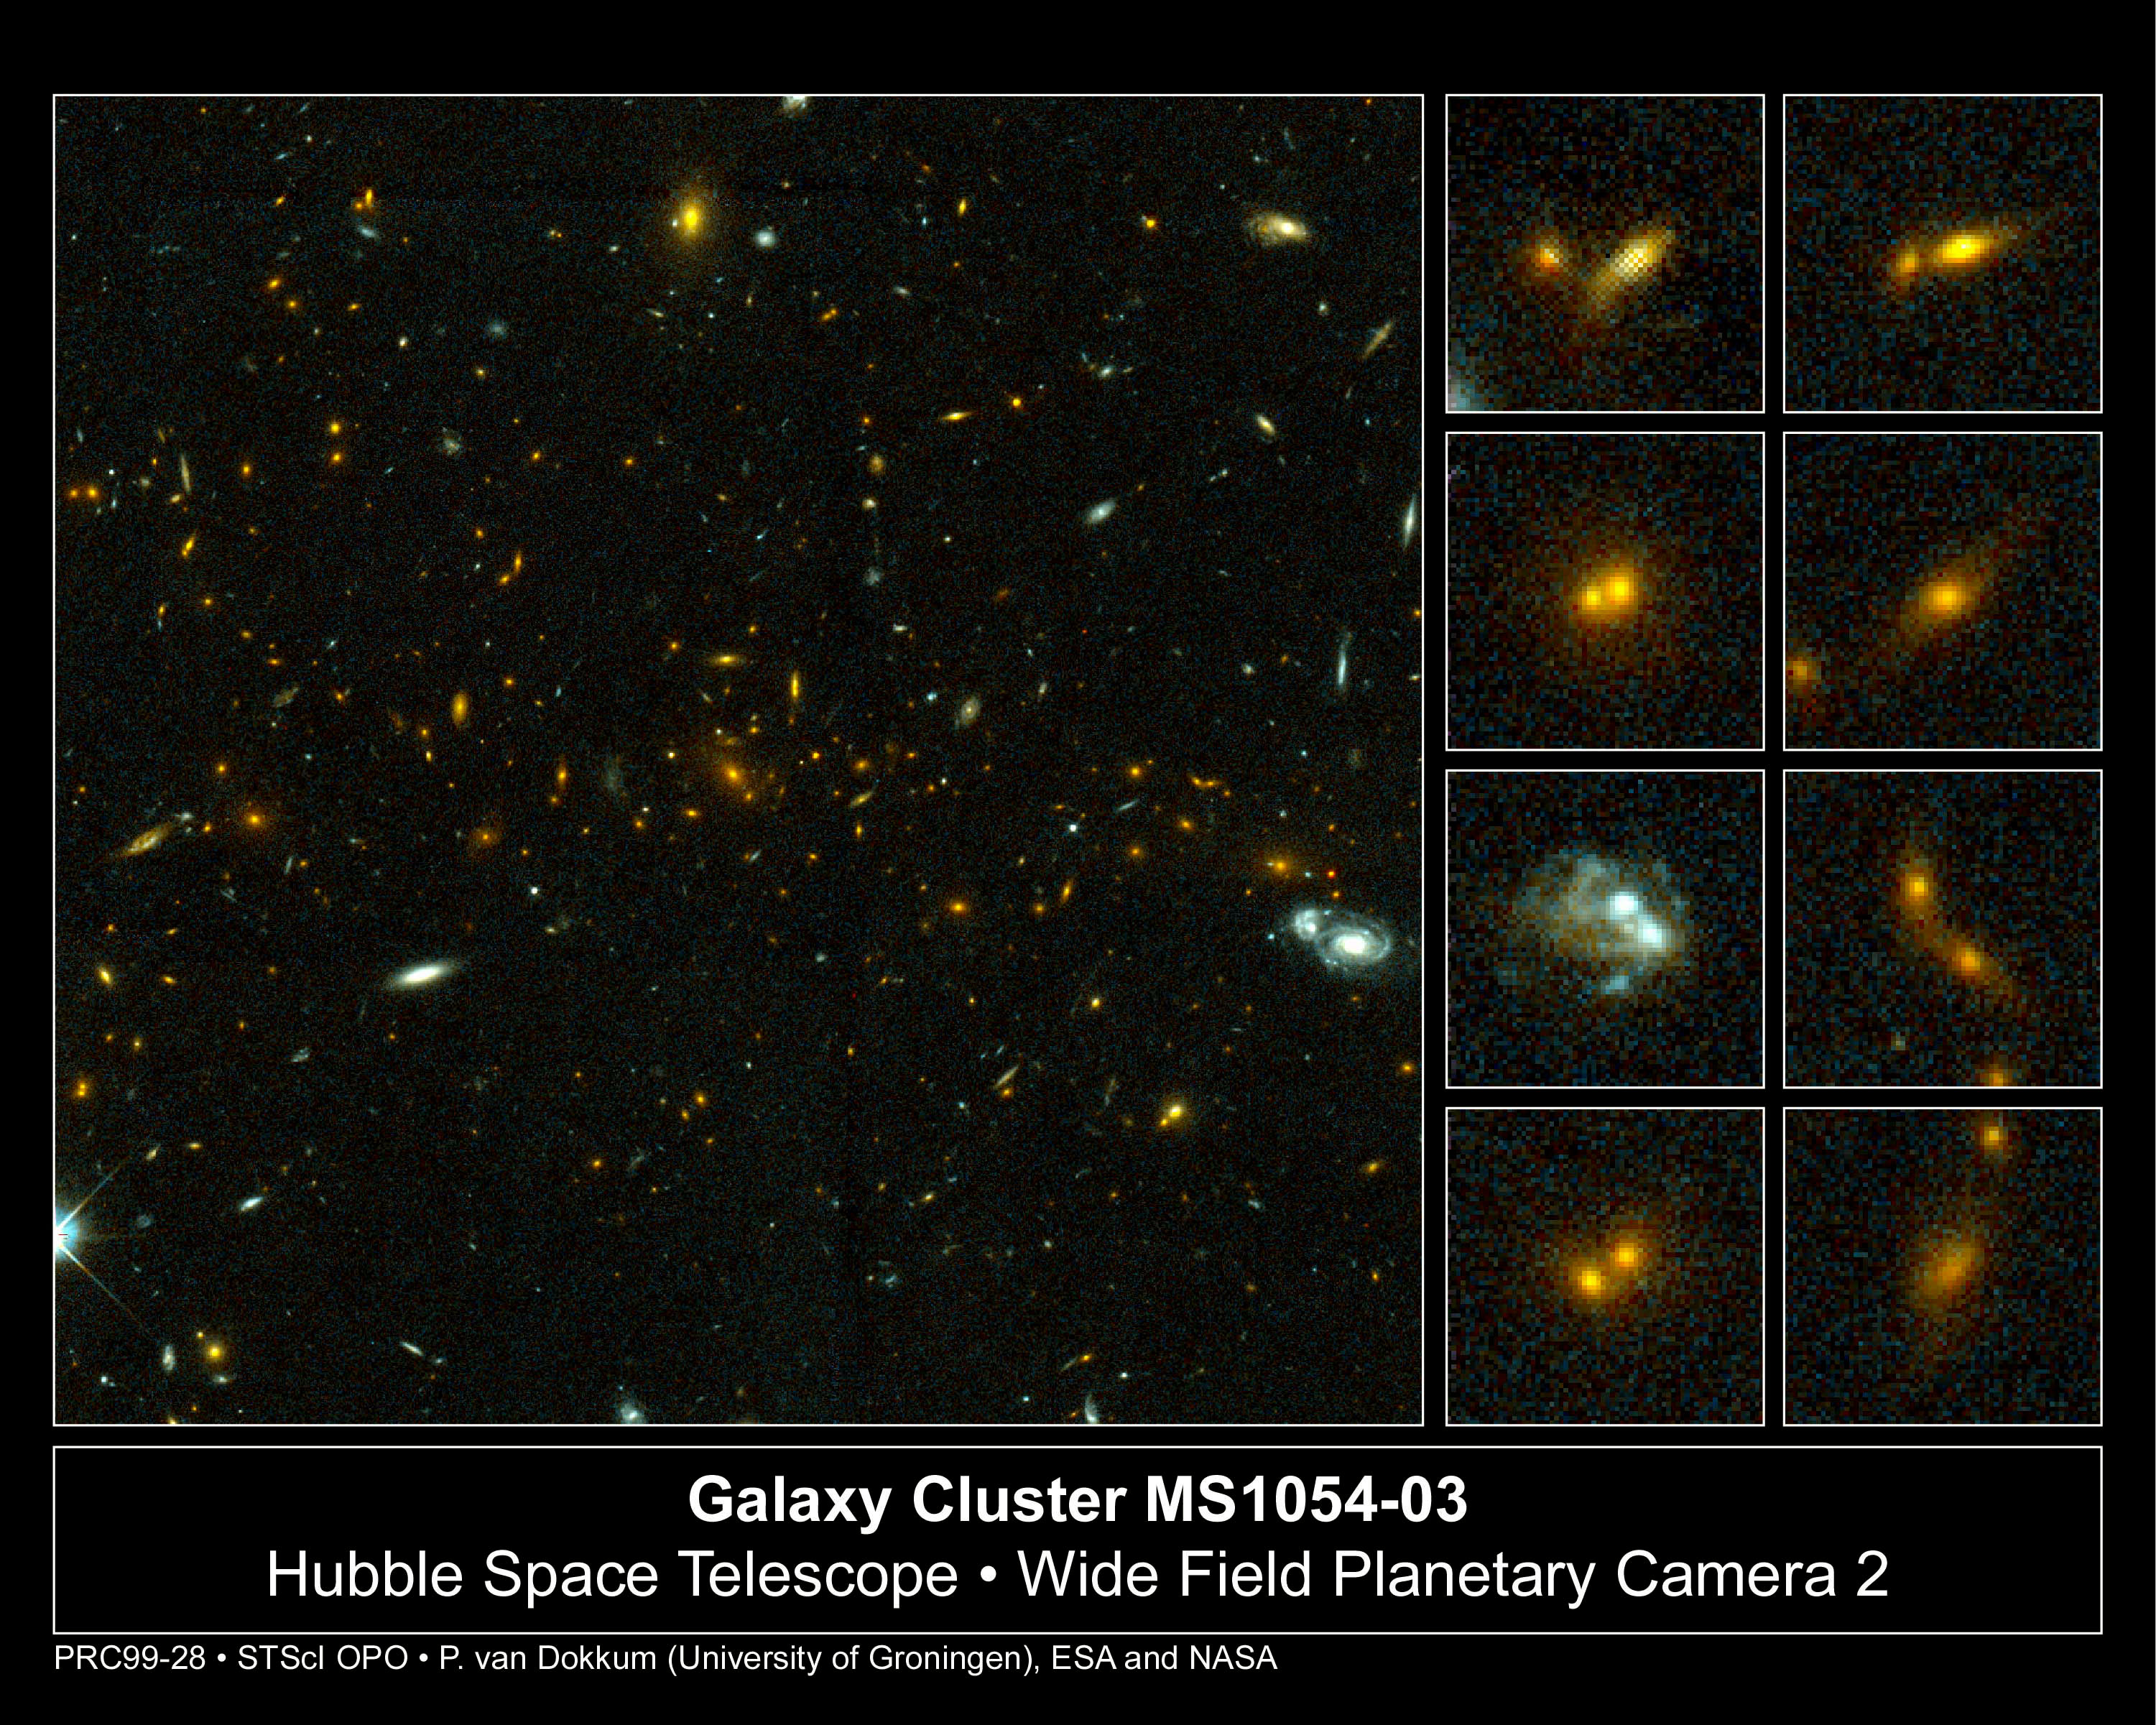

Galaxy Cluster MS1054-03

Exciting Hubble Space Telescope images of more than a dozen very distant colliding galaxies indicate that, at least in some cases, big massive galaxies form through collisions between smaller ones, in a 'generation after generation' never-ending story.

Credit: ESA/NASA, Pieter van Dokkum (University of Groningen/Leiden), Marijn Franx (University of Groningen/Leiden)